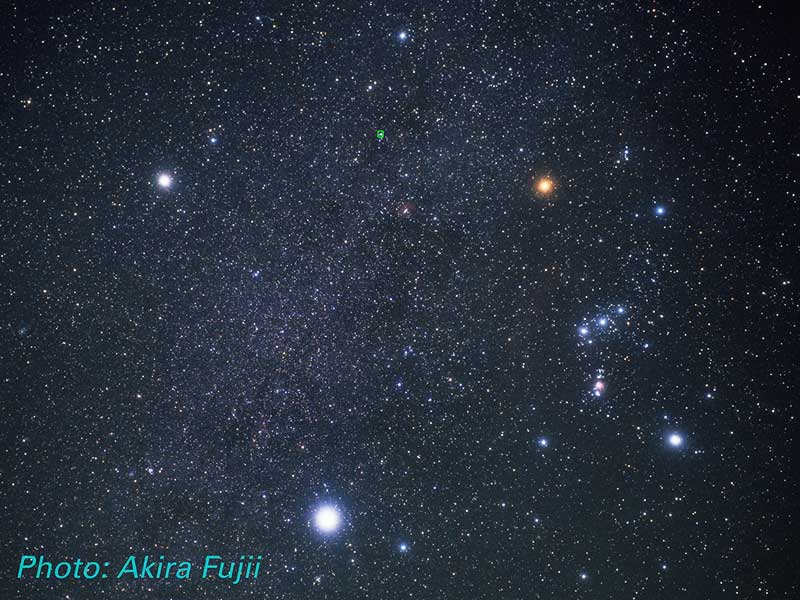

Monoceros, Orion, Canis Major and Canis Minor

Constellation Monoceros, Orion, Canis Major, Canis Minor; Location of the Cone Nebula (ground-based image.

Credit: Akira Fujii